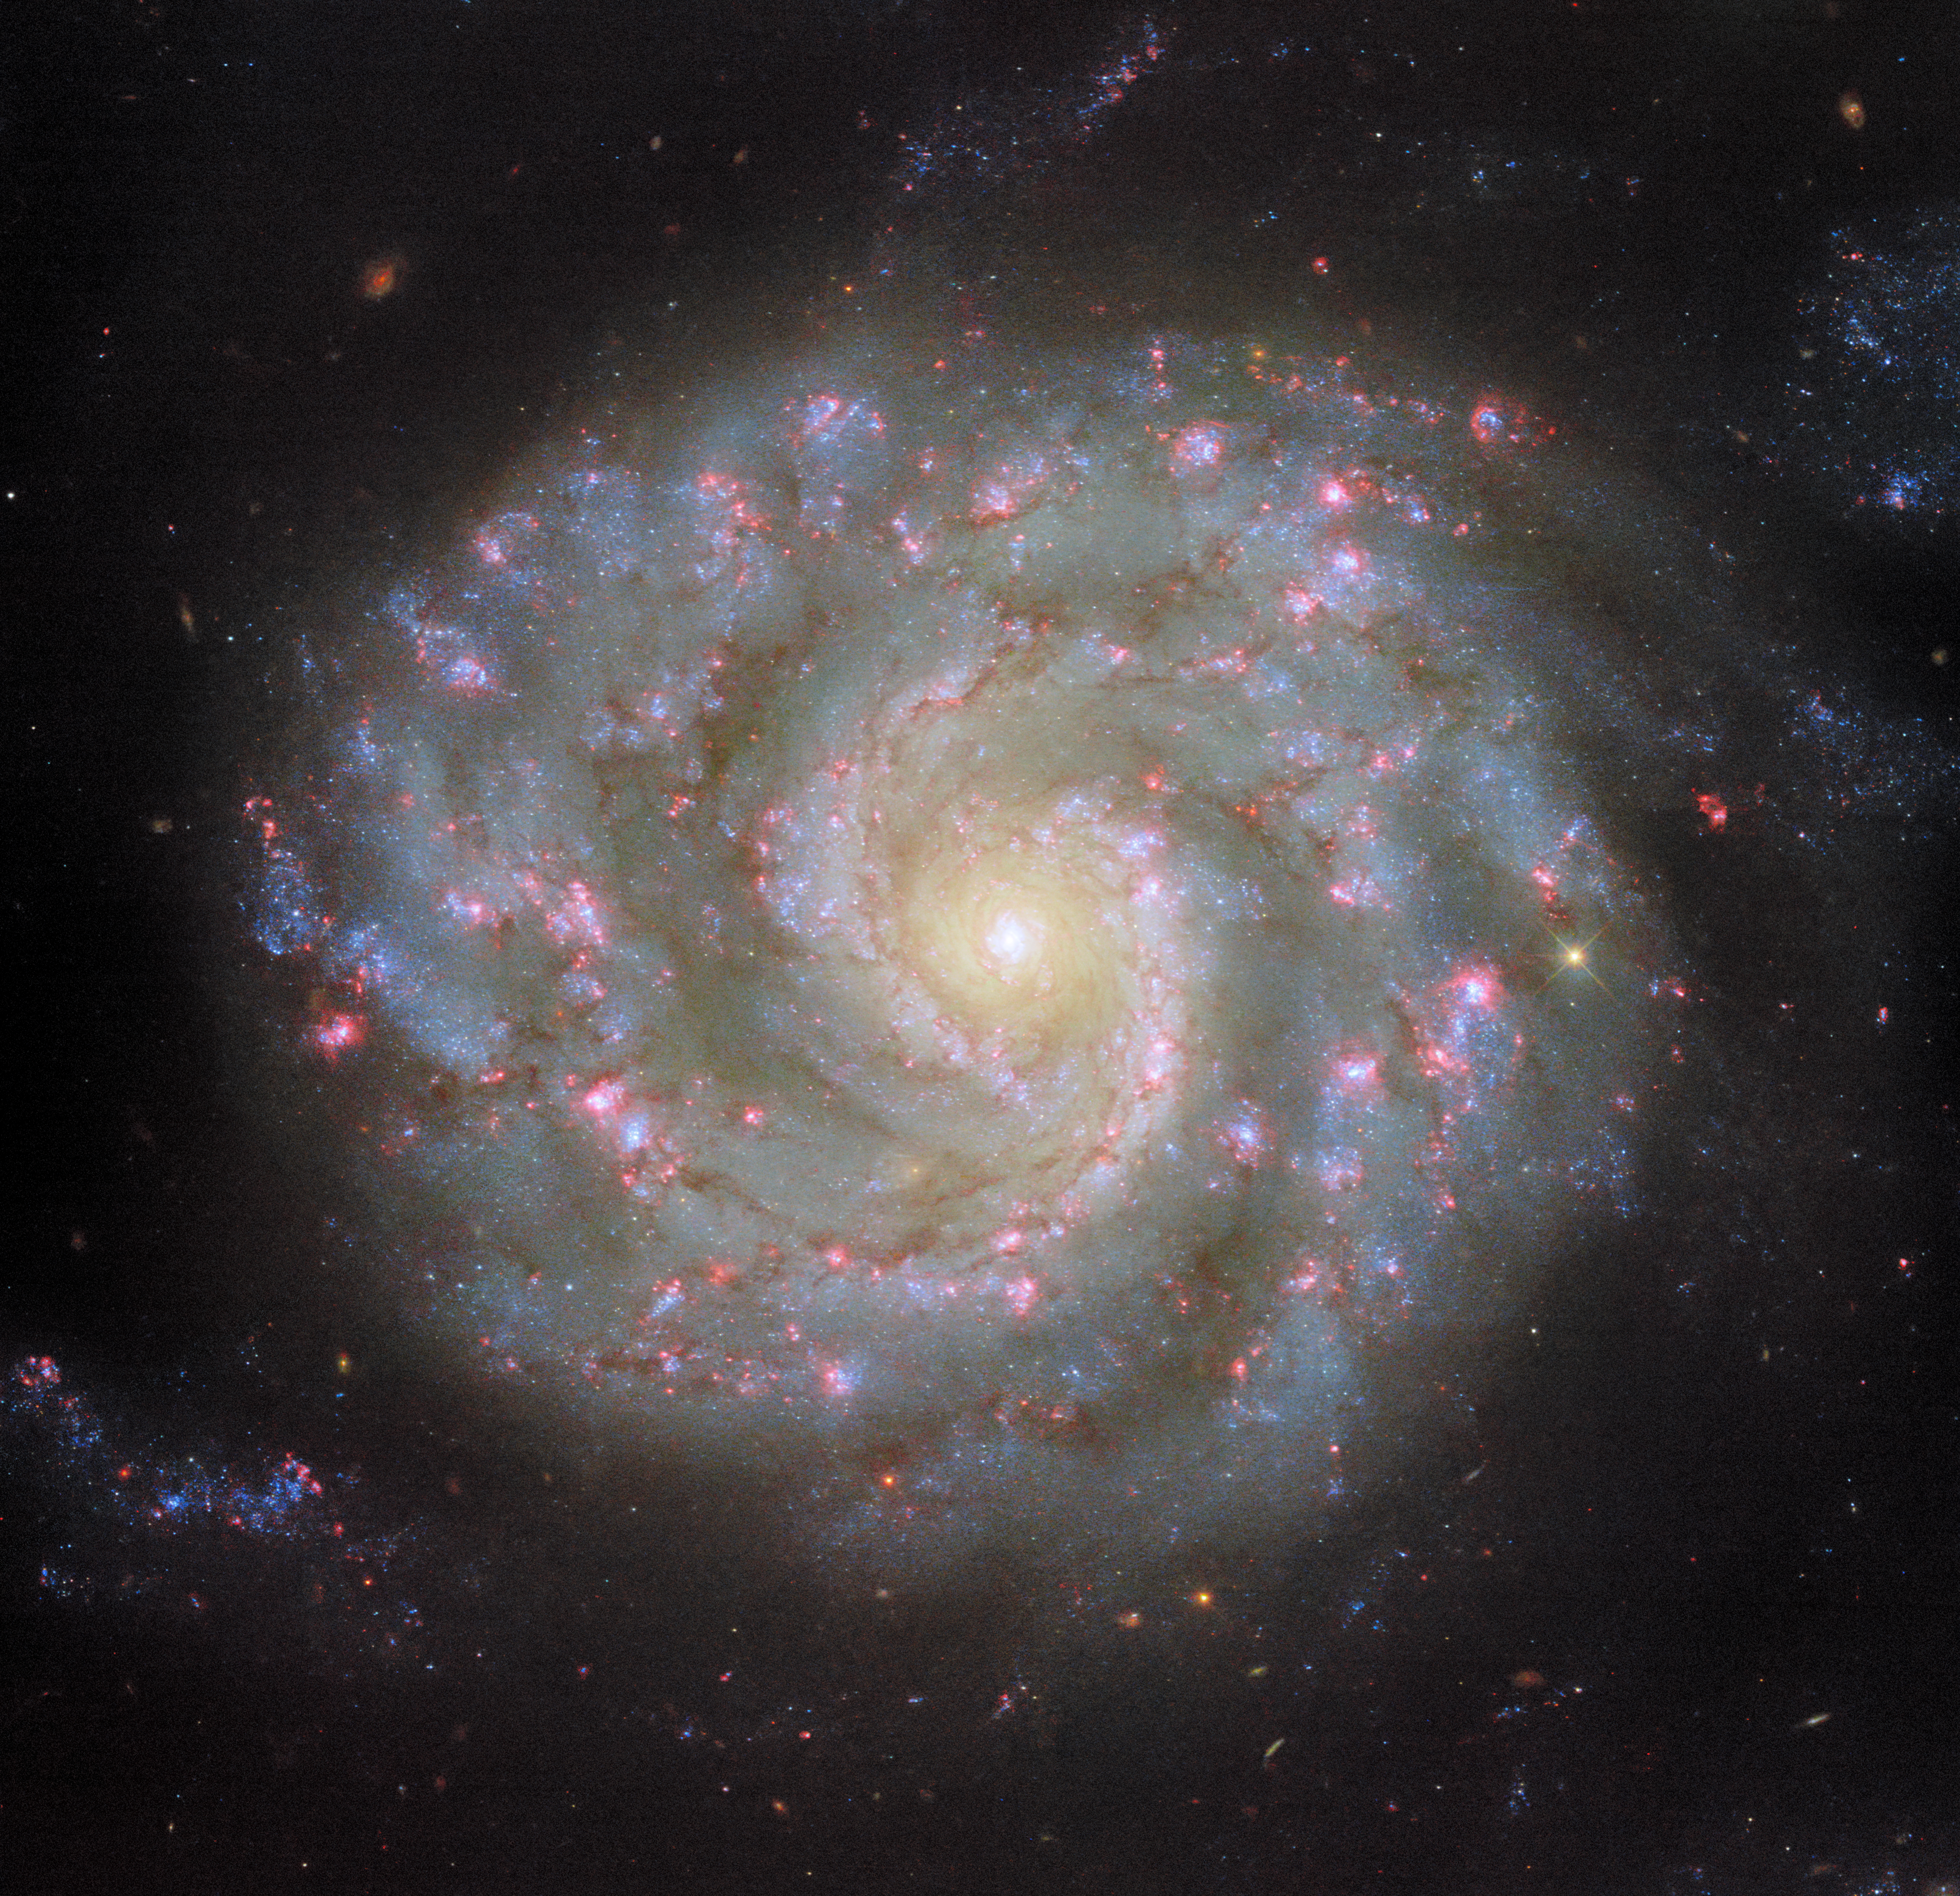

Face to face with a spiral’s arms

The spiral galaxy NGC 3596 is on display in this NASA/ESA Hubble Space Telescope Picture of the Week, which incorporates six different wavelengths of light. NGC 3596 is situated 90 million light-years from Earth in the constellation Leo. The galaxy was discovered in 1784 by astronomer William Herschel, the namesake of ESA’s Herschel Space Observatory.

NGC 3596 appears almost perfectly face-on when viewed from Earth, showcasing the galaxy’s neatly wound spiral arms. The bright arms mark where the galaxy’s stars, gas and dust are concentrated. Star formation is also most active in a galaxy’s spiral arms, as shown by the brilliant pink star-forming regions and young blue stars tracing NGC 3596’s arms in this image.

What causes these spiral arms to form? It’s a surprisingly difficult question to answer, partly because of the remarkable diversity of spiral galaxies. Some have clear spiral arms, while others have patchy, feathery arms. Some have prominent bars across their centres, while others have compact, circular nuclei. Some have close neighbours, while others are isolated.

Early ideas of how spiral arms formed were stumped by what’s called the ‘winding problem’. If a galaxy’s spiral arms are coherent structures, the arms would be wound tighter and tighter as the galaxy spins, until the arms are no longer visible. Now, researchers believe that spiral arms represent a pattern of high-density and low-density areas rather than a physical structure. As stars, gas and dust orbit within a galaxy’s disc, they pass in and out of the spiral arms. Much like cars moving through a traffic jam, these materials slow down and bunch up as they enter a spiral arm, before emerging and continuing their journey through the galaxy.

Credit: ESA/Hubble & NASA, D. Thilker